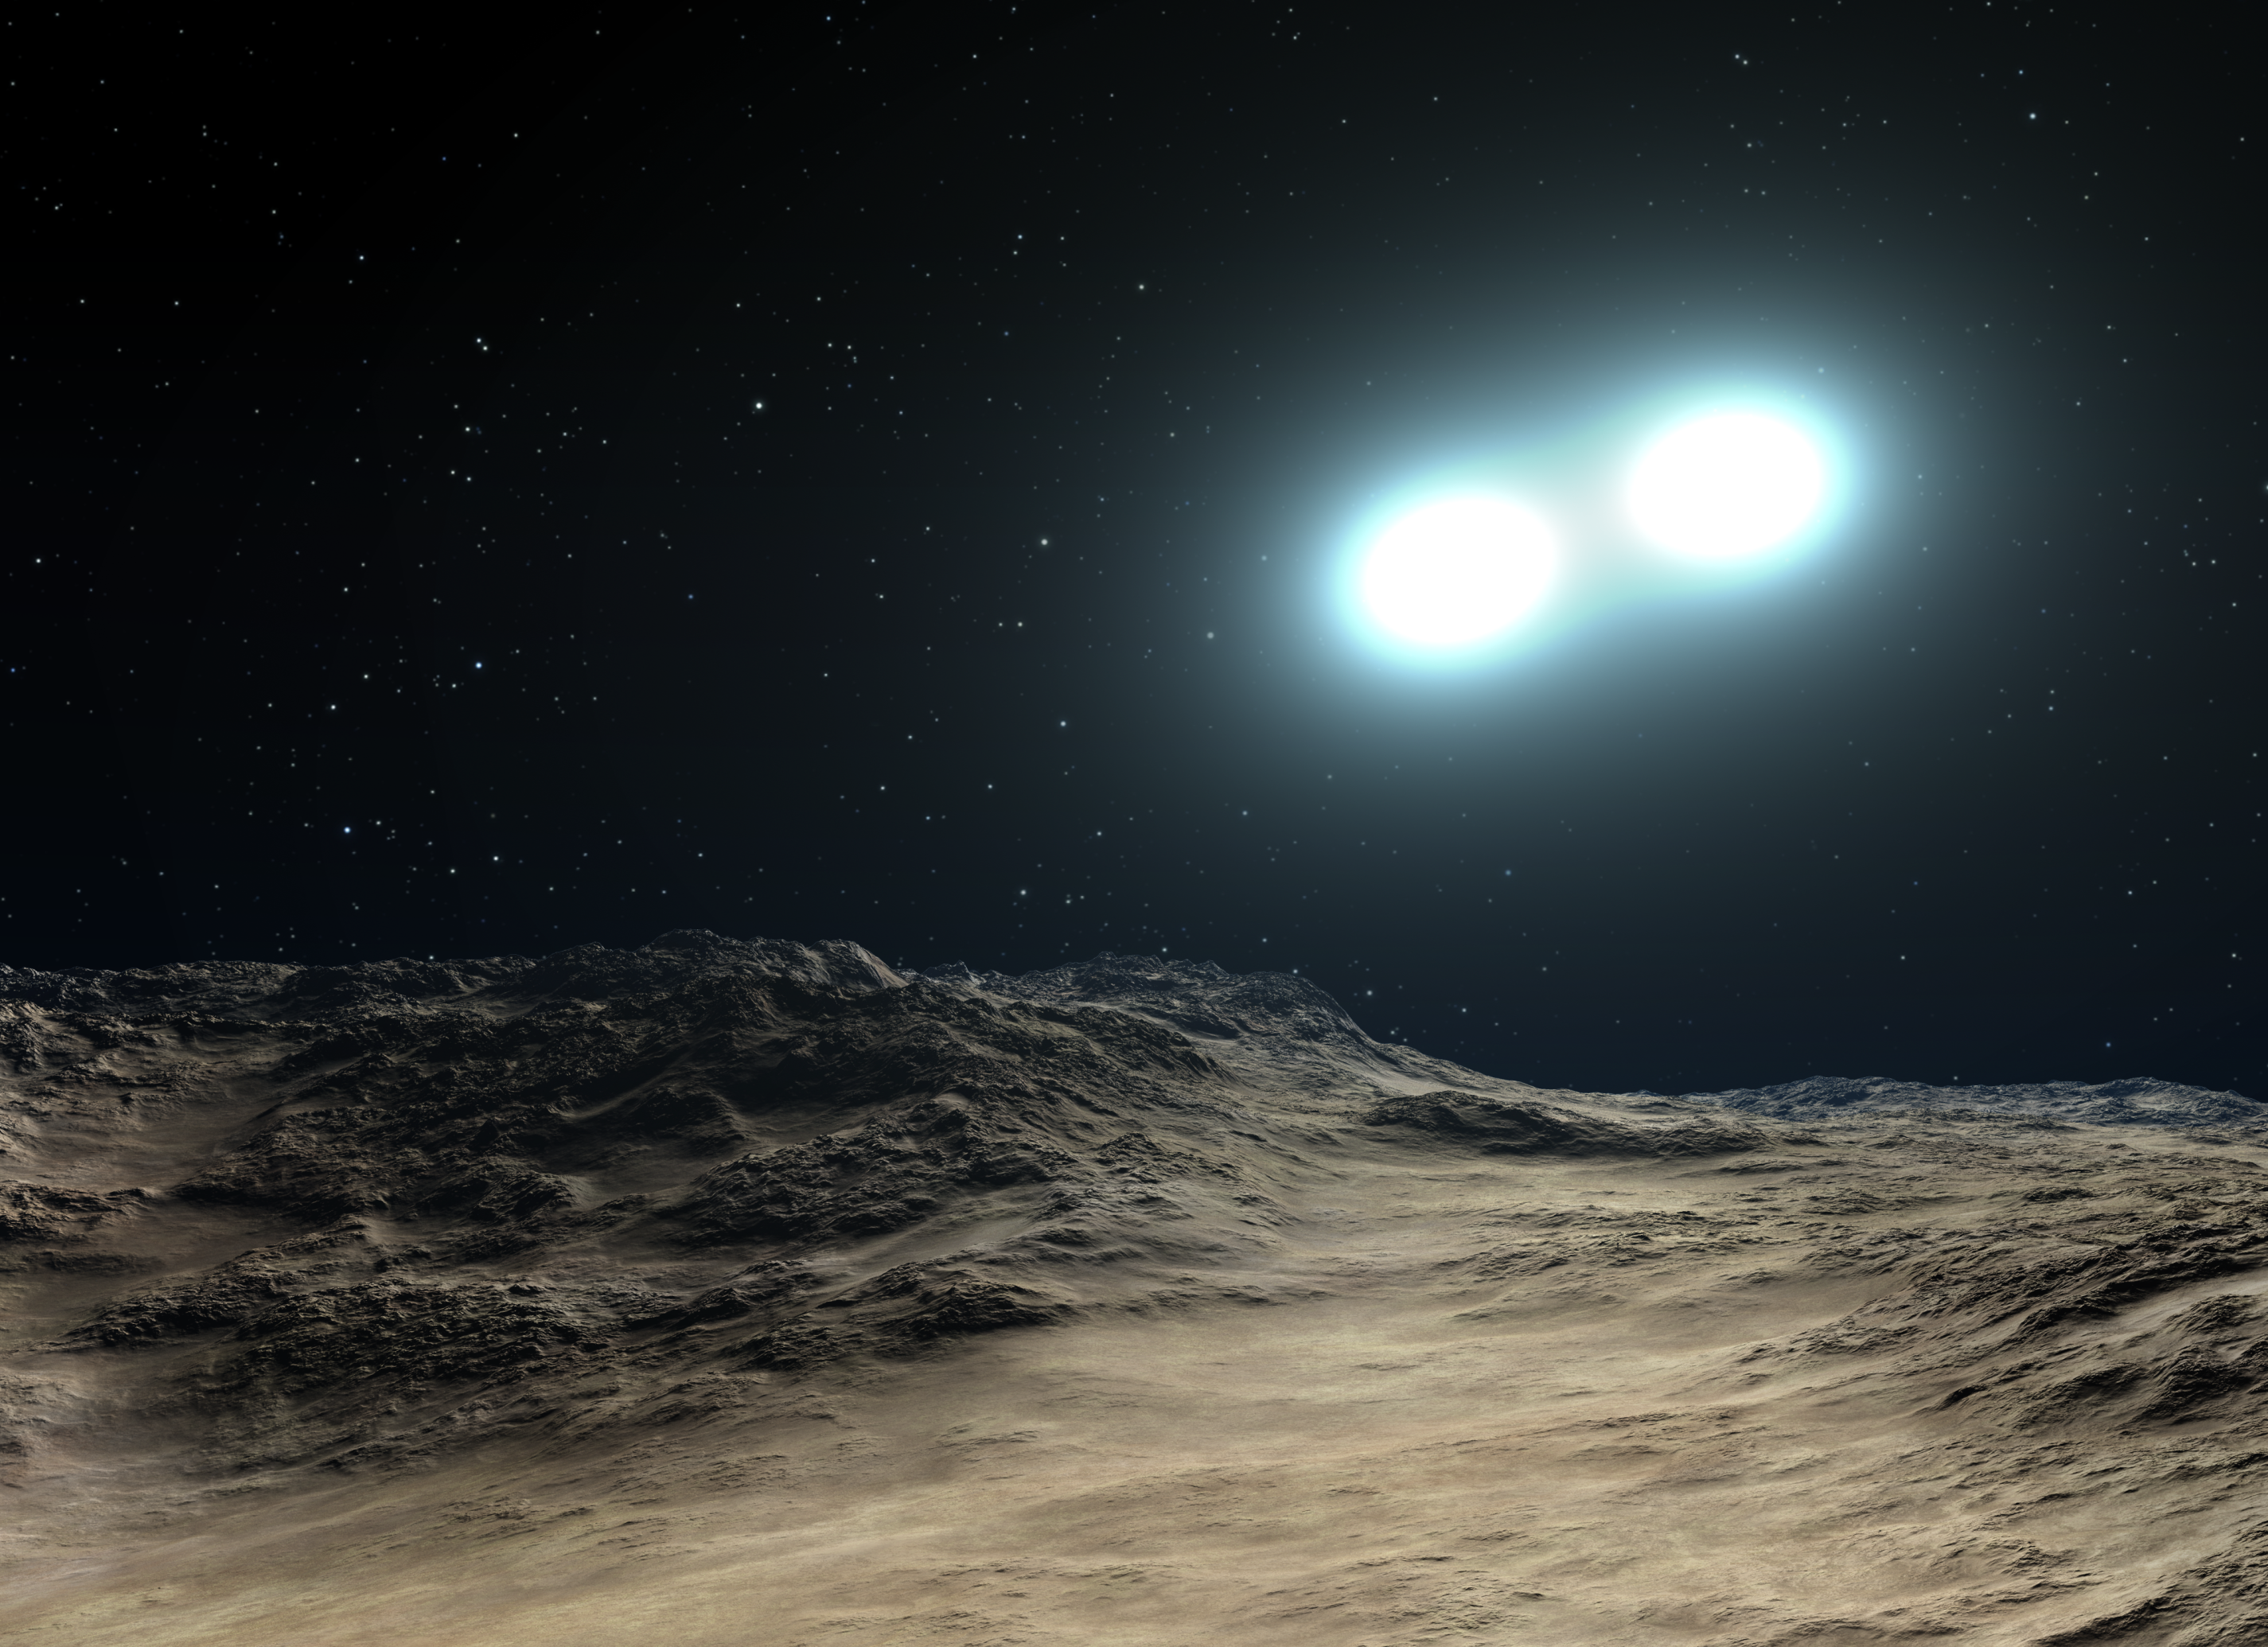

Blue straggler formation (artist's impression)

This is an artist's concept of a close binary pair of stars that are merging to form a blue-straggler-class star. Blue stragglers are so named because they seem to be lagging behind in their rate of aging compared with the population from which they formed. The merger stirs up hydrogen fuel and causes the resulting more massive star to undergo nuclear fusion at a faster rate, causing it to burn hotter and bluer. Probing the star-filled, ancient hub of our Milky Way, the Hubble Space Telescope has found blue stragglers for the first time within our galaxy's bulge.

Credit: NASA, ESA and G. Bacon (STScI). Science Credit: NASA, ESA, W. Clark (Indiana University and UCLA) and K. Sahu (STScI)